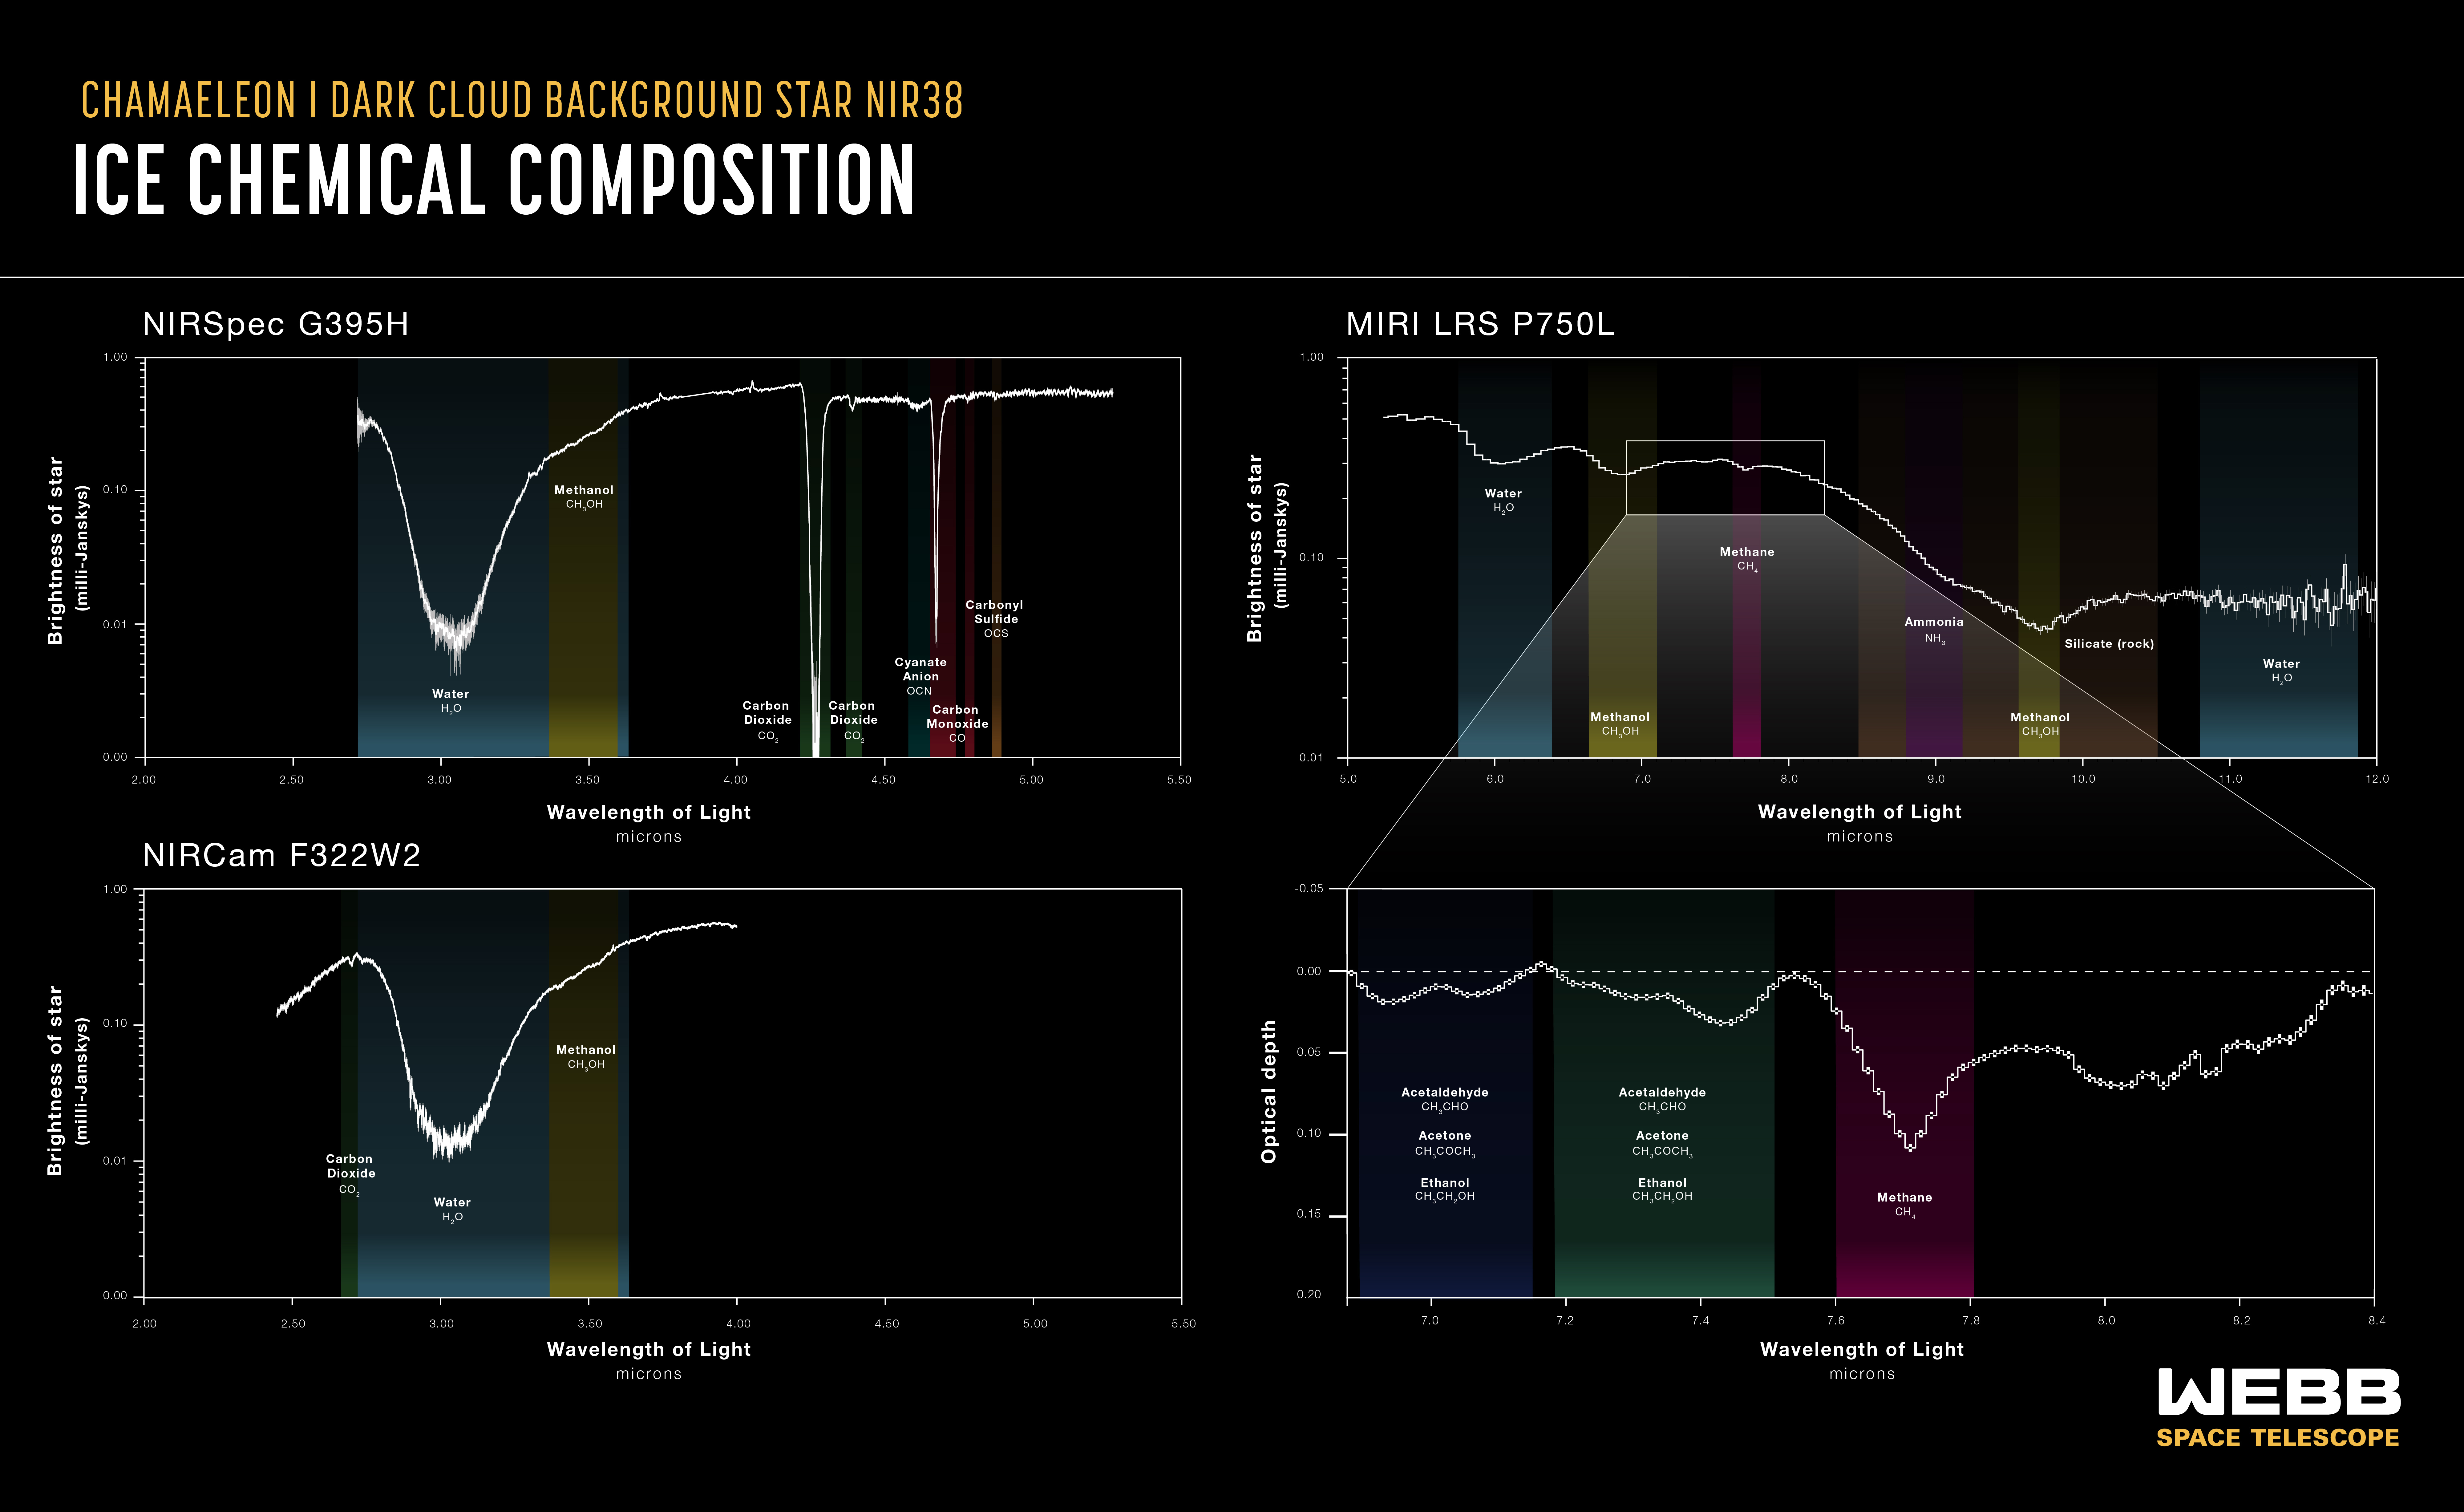

Chameleon I Spectral Graphic

Astronomers have taken an inventory of the most deeply embedded ices in a cold molecular cloud to date. They used light from a background star, named NIR38, to illuminate the dark cloud called Chameleon I. Ices within the cloud absorbed certain wavelengths of infrared light, leaving spectral fingerprints called absorption lines. These lines indicate which substances are present within the molecular cloud.

These graphs show spectral data from three of the James Webb Space Telescope’s instruments. In addition to simple ices like water, the science team was able to identify frozen forms of a wide range of molecules, from carbon dioxide, ammonia, and methane, to the simplest complex organic molecule, methanol.

In addition to the identified molecules, the team found evidence for prebiotic molecules more complex than methanol (indicated in the lower-right panel). Although they didn't definitively attribute these signals to specific molecules, this proves for the first time that complex molecules form in the icy depths of molecular clouds before stars are born.

The upper panels and lower-left panel all show the background star’s brightness versus wavelength. A lower brightness indicates absorption by ices and other materials in the molecular cloud. The lower-right panel displays the optical depth, which is essentially a logarithmic measure of how much light from the background star gets absorbed by the ices in the cloud. It is used to highlight weaker spectral features of less abundant varieties of ice.

Credit: NASA, ESA, CSA, and J. Olmsted (STScI), M. K. McClure (Leiden Observatory), K. Pontoppidan (STScI), N. Crouzet (Leiden University), and Z. Smith (Open University)